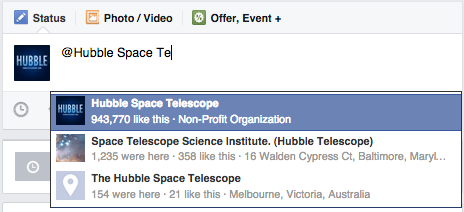

Tagging the Hubble Space Telescope page

This image shows how to tag the Hubble Space Telescope Facebook page when you post your "I'm a Hubble friend! I'm one in a million" selfie. You have to "Like" the page first. Don’t forget to also use the hashtag #Hubble1Million and set the privacy for both the photo and post to "public" so that we can find them.

Credit: ESA/Hubble